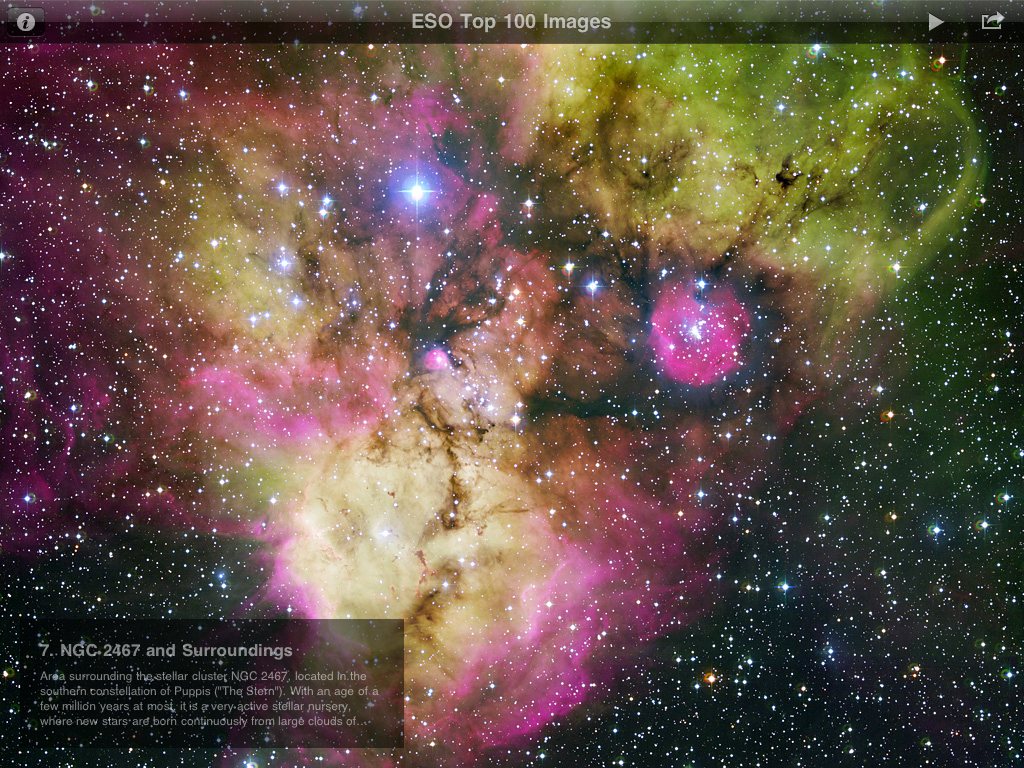

The ESO Top 100 Images iPad App Screenshot

The ESO Top 100 Images app is a free iPad app that brings users a selection of the best astronomy images taken by ESO’s ground-based telescopes from the Atacama Desert in Chile. Among the features of the app are captions and links for more information, a wallpaper option, slideshow play mode with background music. The image shows screenshots from the ESO Top 100 Images app. You can download the app for free from here.

Credit: ESA/Victor R. Ruiz